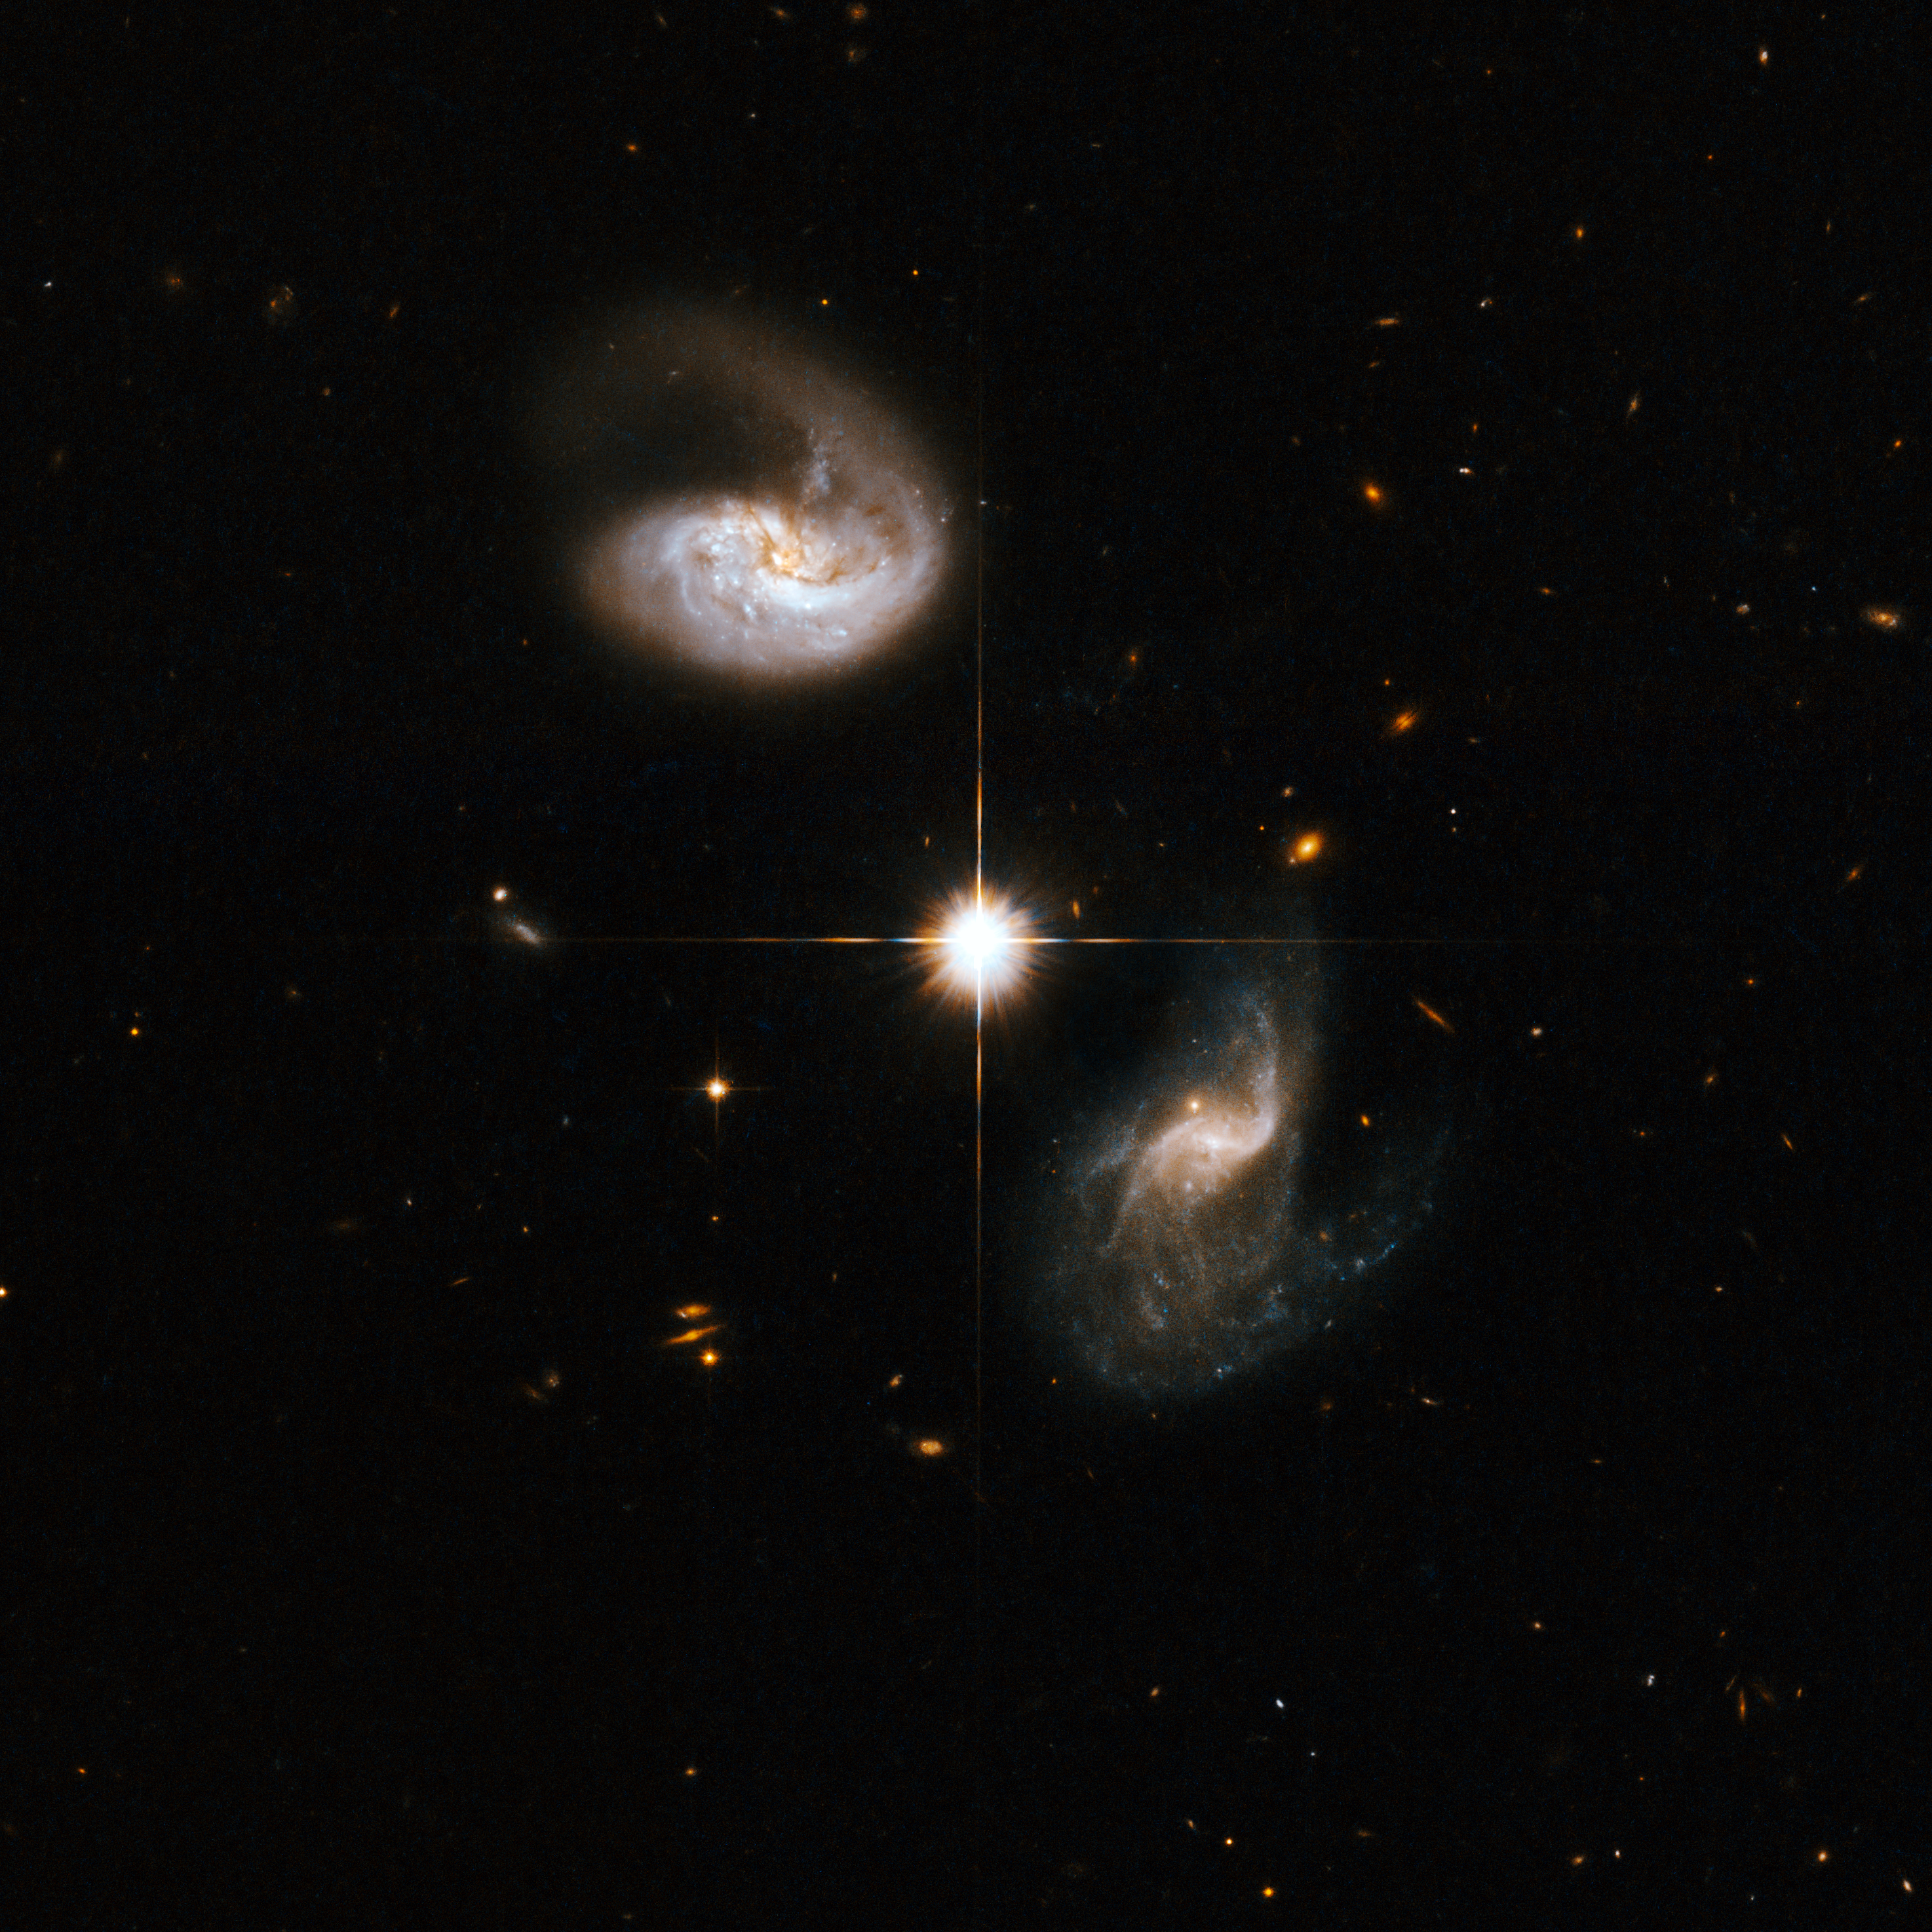

CGCG436-030

CGCG436-030, the eye-catching spiral galaxy in the image, shows a very pronounced curling tail. The companion galaxy, located to the bottom-right of the image, displays an intricate structure, including a number of trails that extend quite far out from its core. The bright star that appears between the two galaxies does not belong to the interacting system and is located within the Milky Way. IRAS 01173+1405 is located in the constellation of Pisces, the Fish, about 400 million light-years away.

This image is part of a large collection of 59 images of merging galaxies taken by the Hubble Space Telescope and released on the occasion of its 18th anniversary on 24th April 2008.

Credit: NASA, ESA, the Hubble Heritage Team (STScI/AURA)-ESA/Hubble Collaboration and A. Evans (University of Virginia, Charlottesville/NRAO/Stony Brook University)